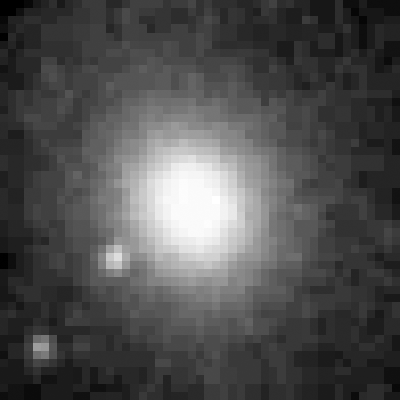

Galaxy NGC 6251 Nucleus

A ground-based telescopic view of the core of the elliptical galaxy NGC 6251. The inset box shows Hubble Space Telescope's field of view. The galaxy is 300 million light-years away in the constellation Ursa Minor.

Credit: Philippe Crane (European Southern Observatory), and NASA/ESA